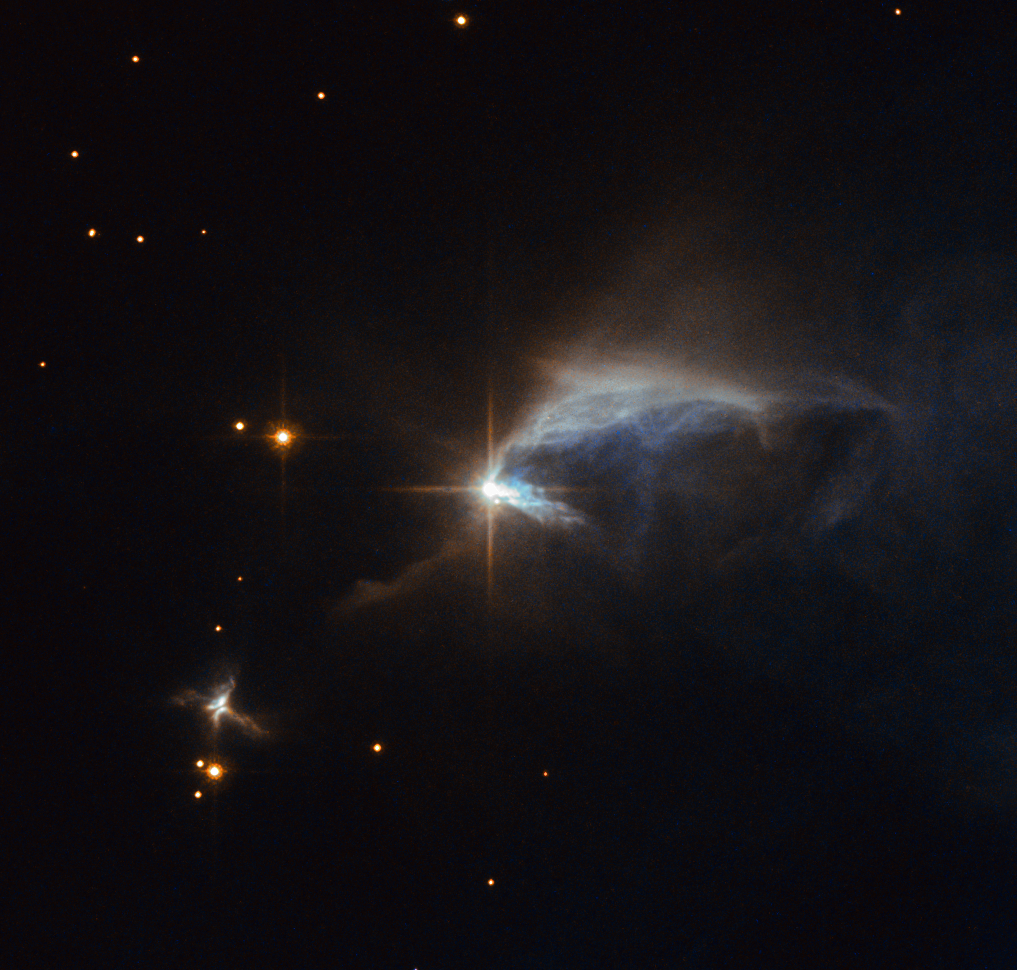

A diamond in the dust

Surrounded by an envelope of dust, the subject of this NASA/ESA Hubble Space Telescope image is a young pre-main-sequence star known as HBC 1. The star is in an immature and adolescent phase of life, hence its classification — most of a Sun-like star’s life is spent in a stage comparable to human adulthood dubbed the main sequence.

In this view, HBC 1 illuminates a wispy reflection nebula known as IRAS 00044+6521. Formed from clouds of interstellar dust, reflection nebulae do not emit any visible light of their own and instead — like fog encompassing a lamppost — shine via the light from the stars embedded within. Though nearby stars cannot ionise the nebula’s non-gaseous contents, as with brighter emission nebulae, scattered starlight can make the dust visible.

What makes this seemingly ordinary reflection nebula more interesting are three nearby Herbig–Haro objects known as HH 943, HH 943B and HH 943A — which are not visible in this image — located within IRAS 00044+6521 itself. Herbig–Haro objects are small patches of dust, hydrogen, helium and other gases that form when narrow jets of gas ejected by young stars such as HBC 1 collide with clouds of gas and dust. Lasting just a few thousand years, these objects rapidly move away from their parent star before dissipating into space.

Credit: ESA/Hubble & NASA Acknowledgement: Judy Schmidt